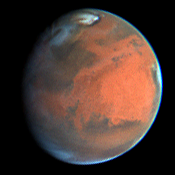

Decay of a Martian Dust Storm

On July 9, 1997, a streamer of dust is visible in the North polar region, extending about 1200 km southward from the dark sand dunes surrounding the polar ice cap.

When compared to a similar image taken on June 27, 1997, one can see that major changes takes place in the Martian atmosphere.

Credit: Steve Lee (Univ. Colorado), Phil James (Univ. Toledo), and Mike Wolff (Univ. Toledo), and NASA/ESA